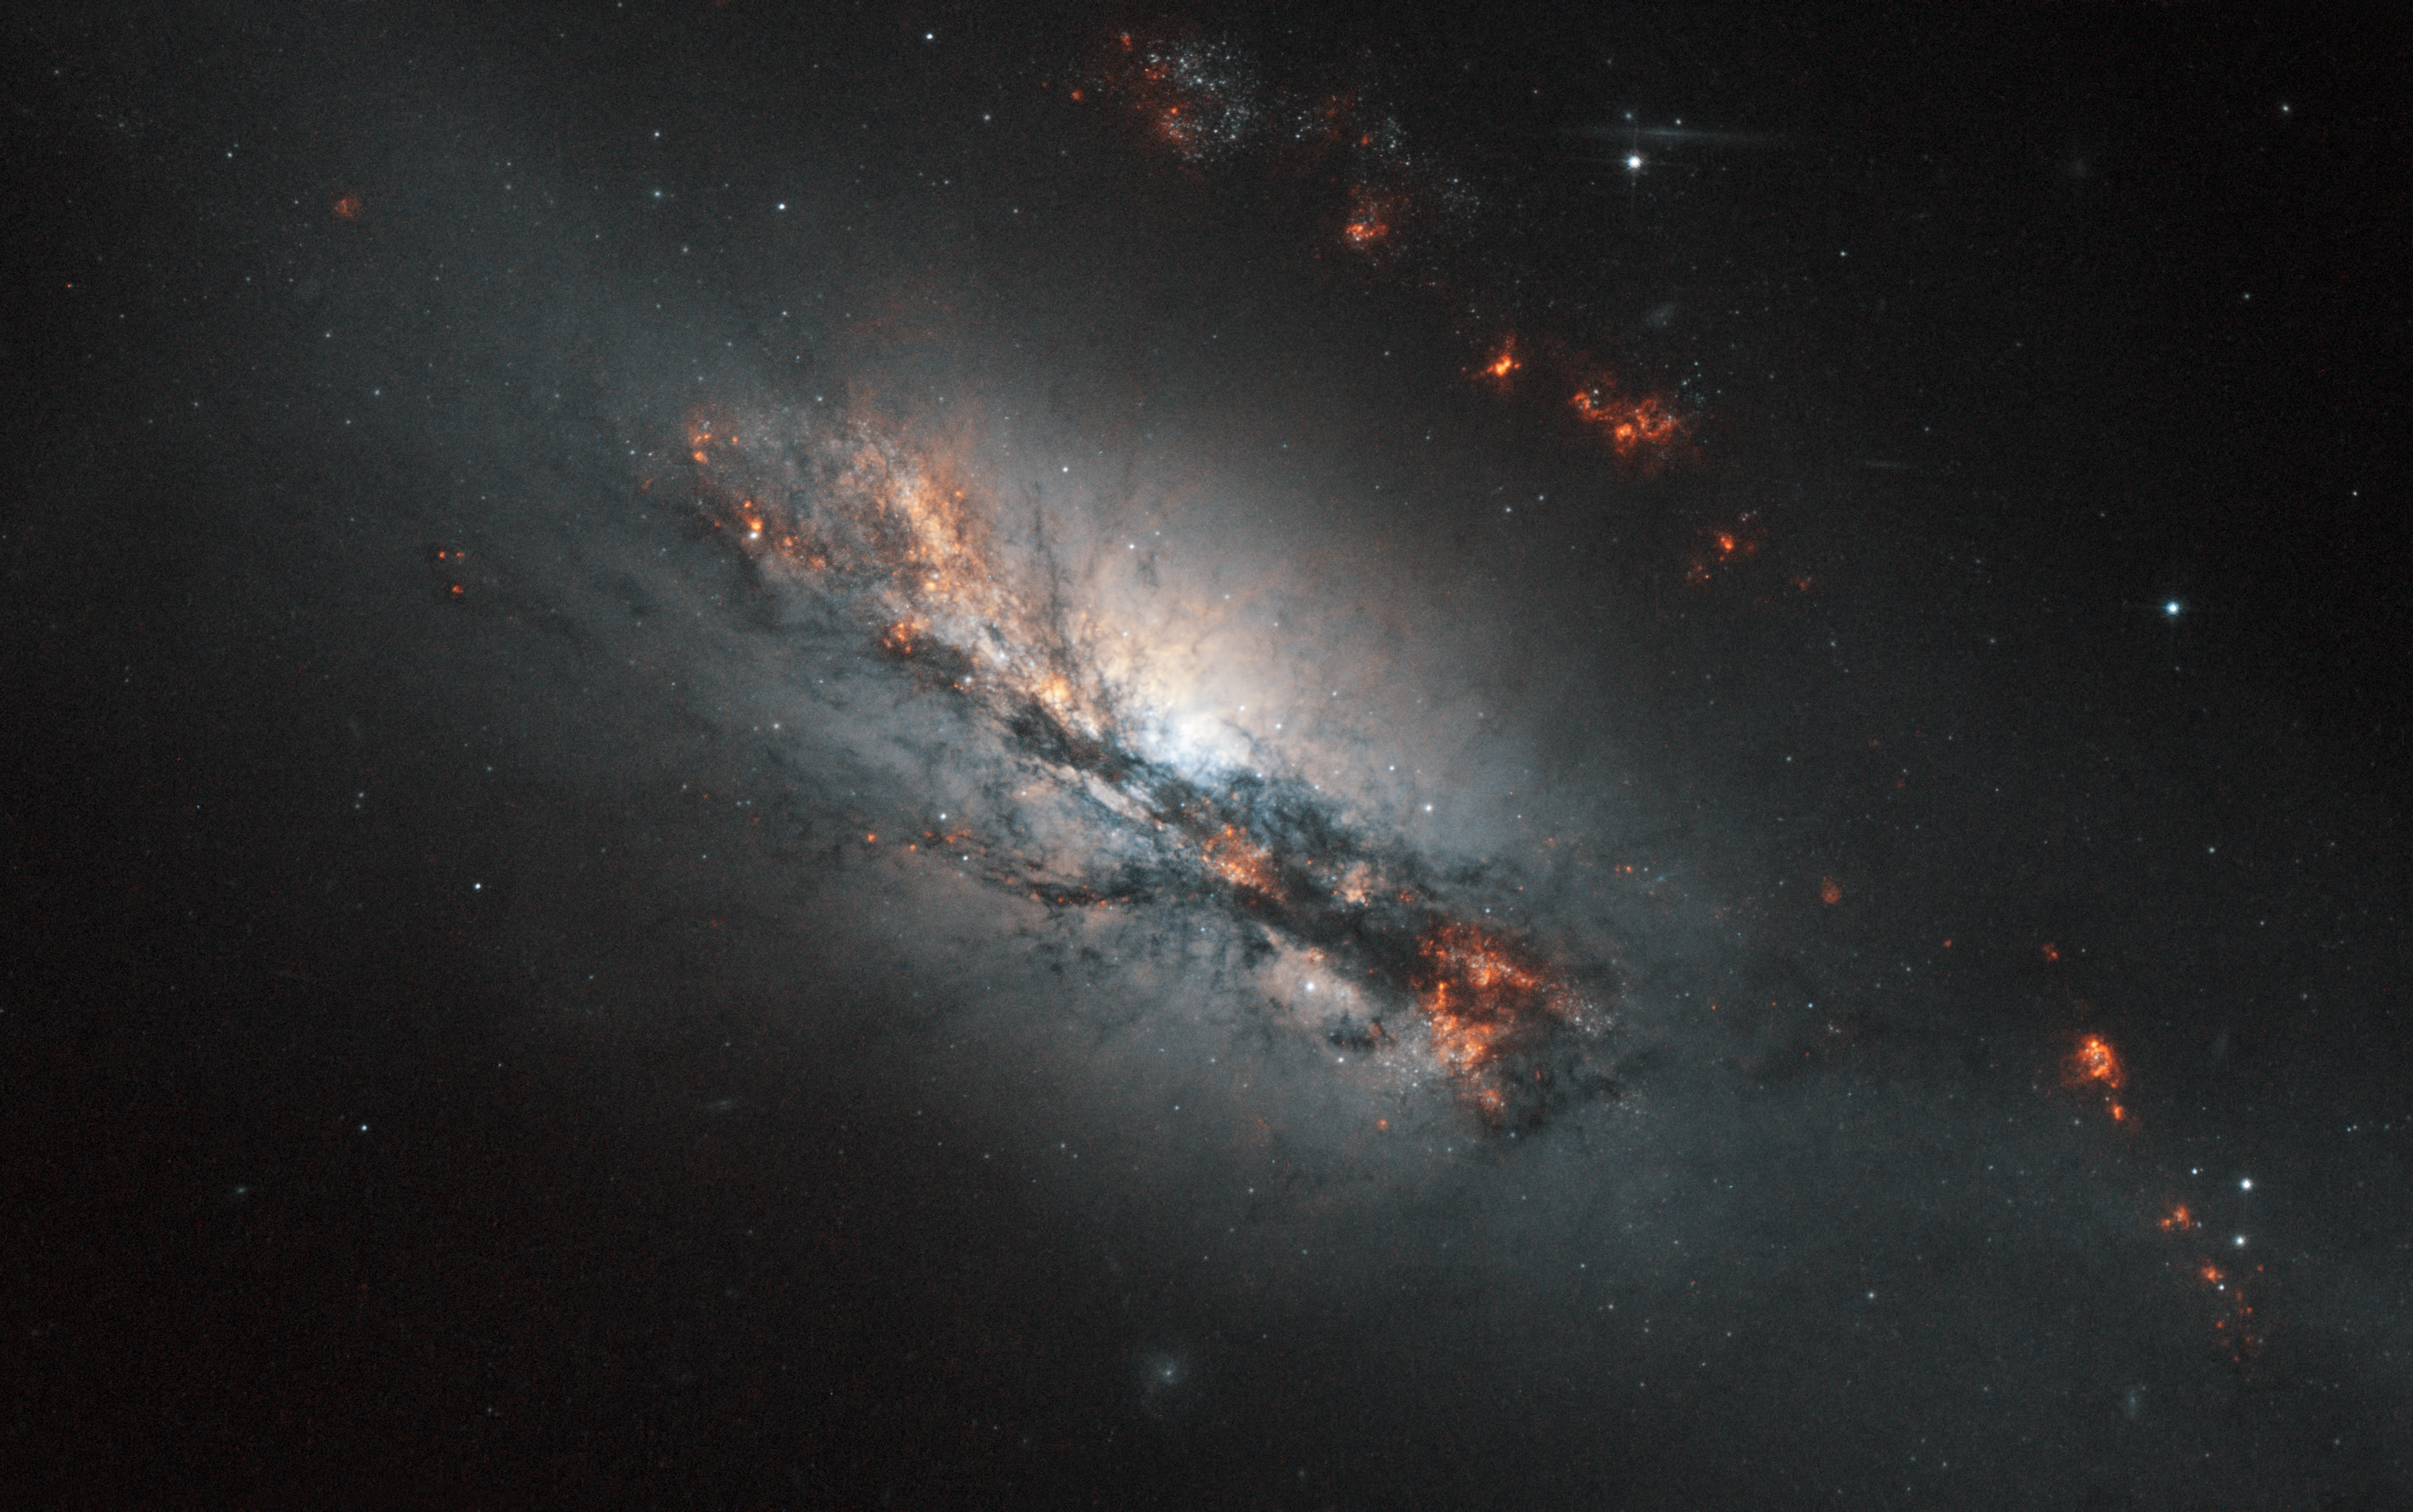

Feeling the strain

NGC 2146 is classified as a barred spiral due to its shape, but the most distinctive feature is the dusty spiral arm that has looped in front of the galaxy's core as seen from our perspective. The forces required to pull this structure out of its natural shape and twist it up to 45 degrees are colossal. The most likely explanation is that a neighbouring galaxy is gravitationally perturbing it and distorting the orbits of many of NGC 2146’s stars. It is probable that we are currently witnessing the end stages of a process which has been occurring for tens of millions of years.

NCG 2146 is undergoing intense bouts of star formation, to such an extent that it is referred to as a starburst galaxy. This is a common state for barred spirals, but the extra gravitational disruption that NGC 2146 is enduring no doubt exacerbates the situation, compressing hydrogen-rich nebulae and triggering stellar birth.

Measuring about 80 000 light-years from end to end, NGC 2146 is slightly smaller than the Milky Way. It lies approximately 70 million light-years distant in the faint northern constellation of Camelopardalis (The Giraffe). Although it is fairly easy to see with a moderate-sized telescope as a faint elongated blur of light it was not spotted until 1876 when the German astronomer Friedrich Winnecke found it visually using just a 16 cm telescope.

This picture was created from images taken with the Wide Field Channel of Hubble’s Advanced Camera for Surveys. Images through a near-infrared filter (F814W, coloured blue and orange/brown) were combined with images taken in a filter that isolates the glow from hydrogen gas (F658N, coloured red). An additional green colour channel was also created by combining the two to help to create a realistic colour rendition for the final picture from this unusual filter combination. The total exposure times were 120 s and 700 s respectively and the field of view is covers 2.6 x 1.6 arcminutes.

Credit: ESA/Hubble & NASA